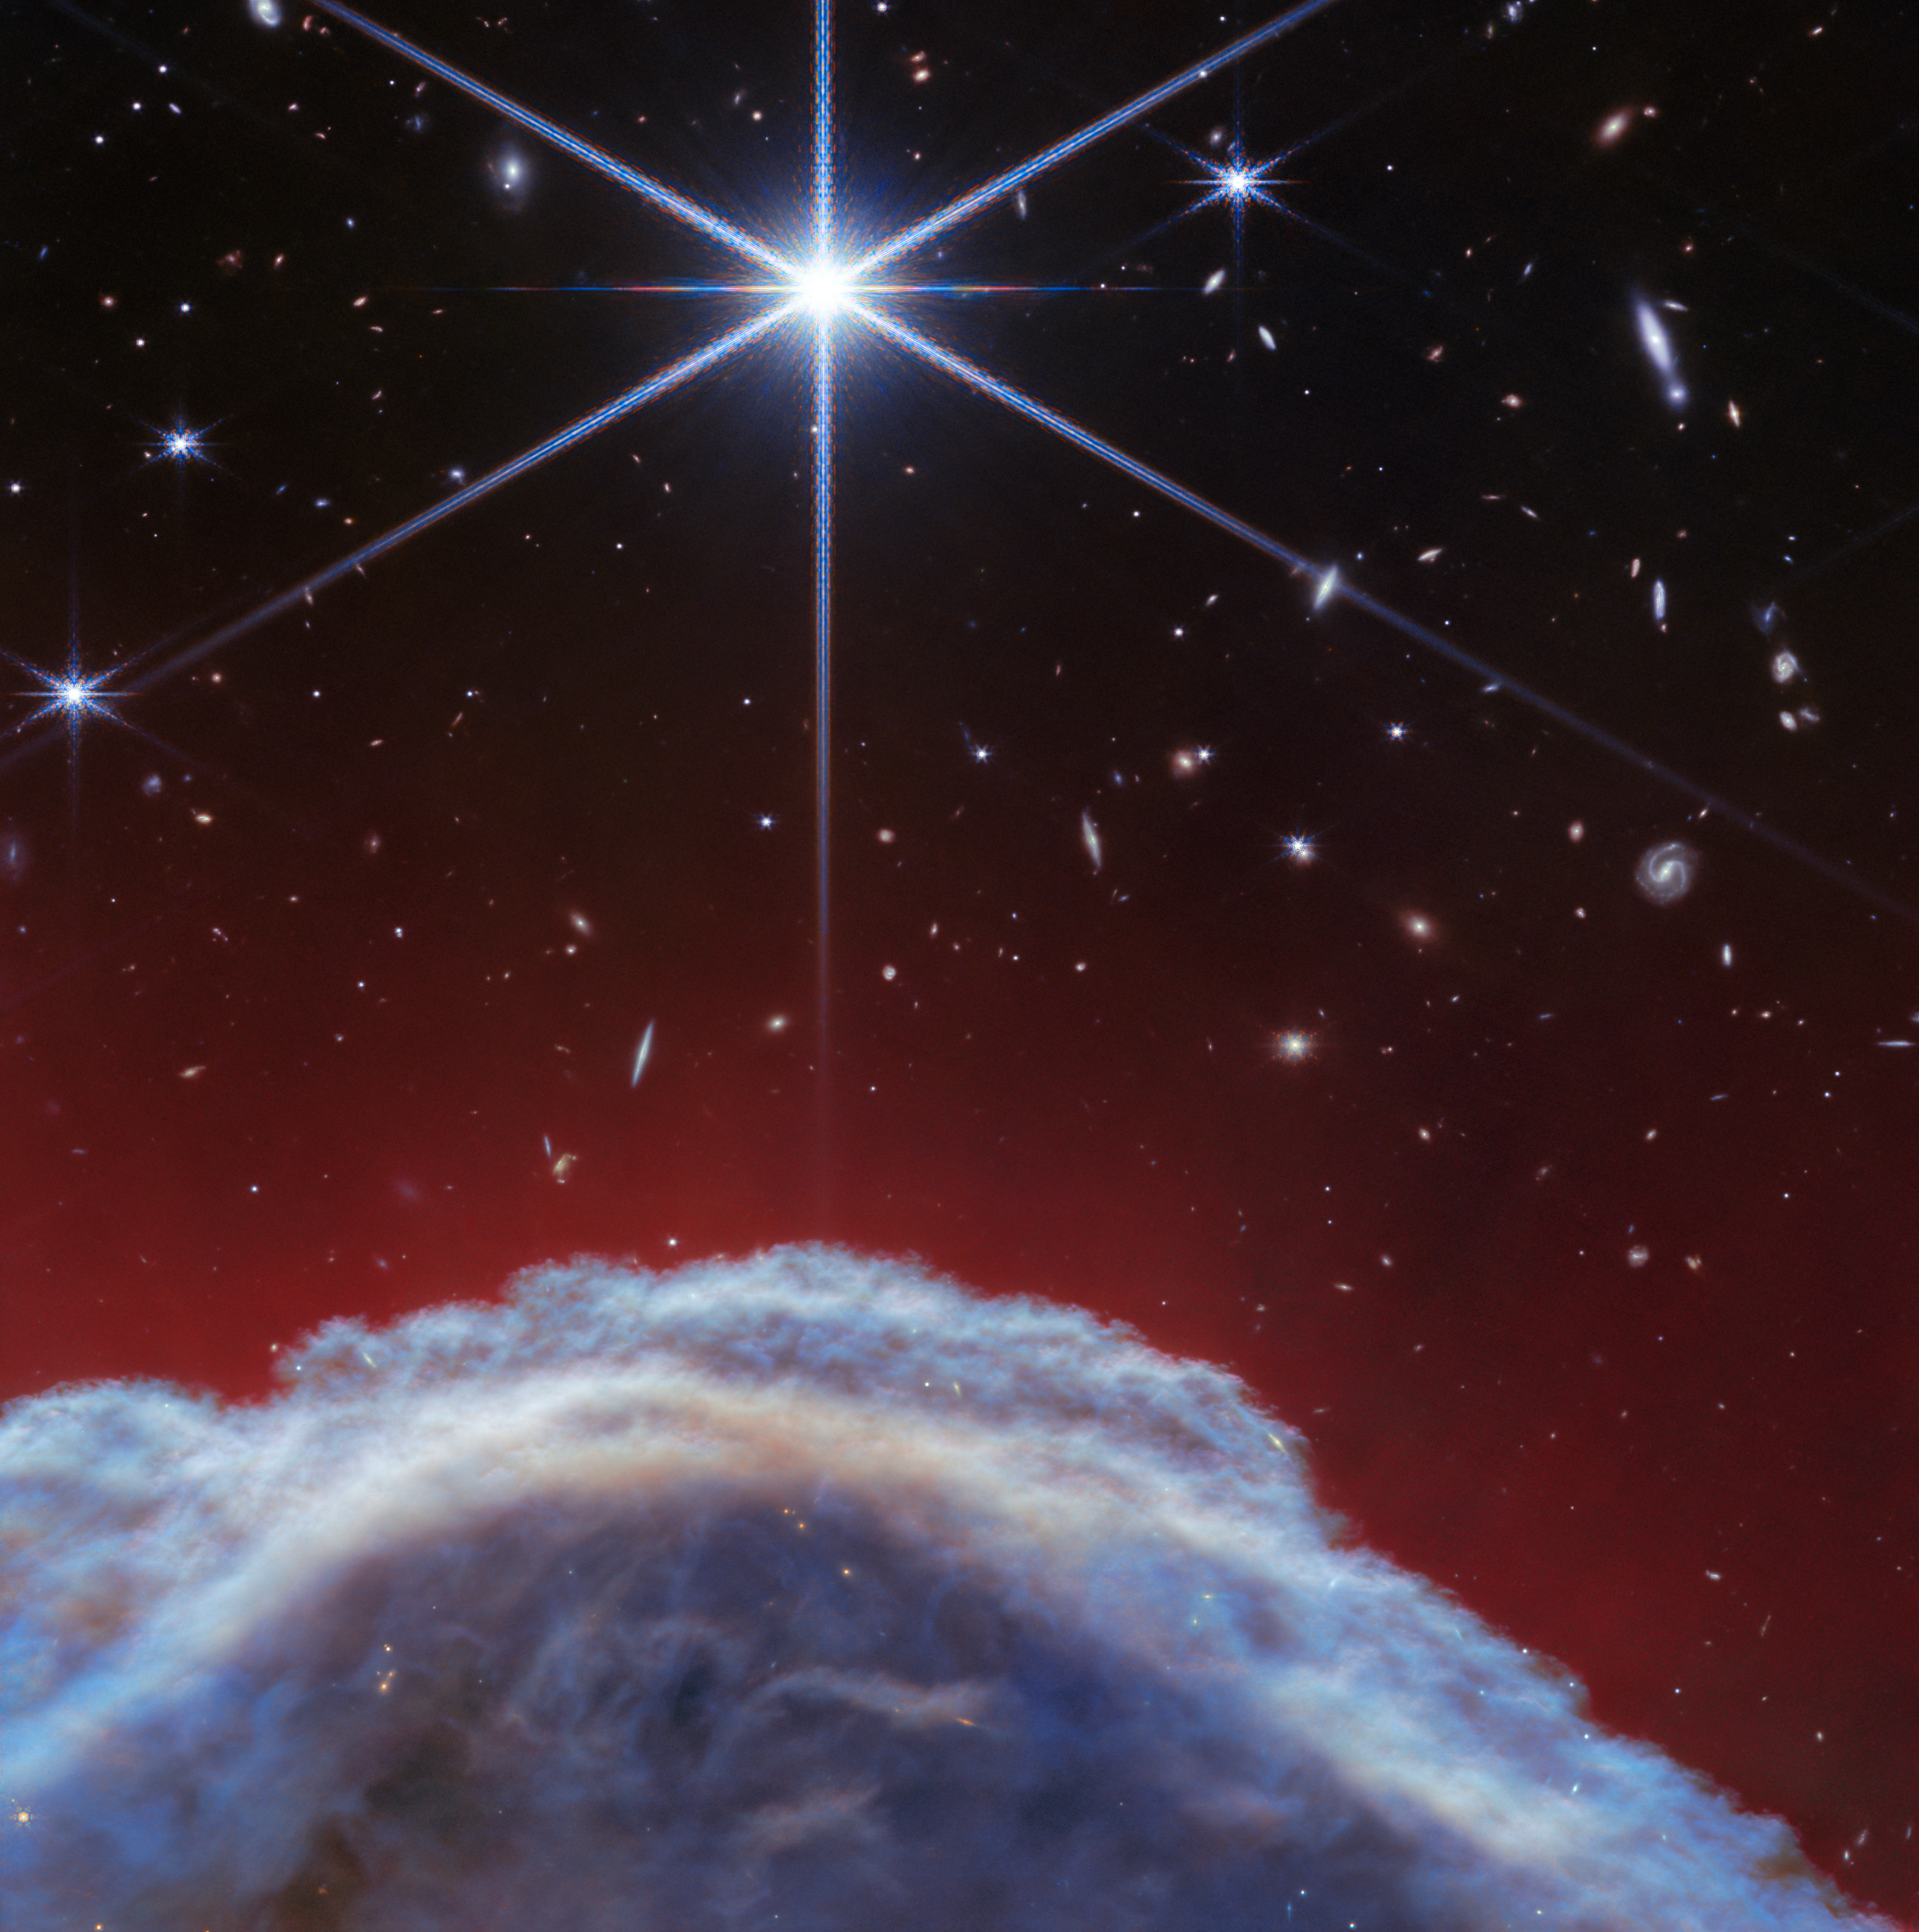

Horsehead Nebula (NIRCam image)

The NASA/ESA/CSA James Webb Space Telescope has captured the sharpest infrared images to date of one of the most distinctive objects in our skies, the Horsehead Nebula. These observations show a part of the iconic nebula in a whole new light, capturing its complexity with unprecedented spatial resolution.

Webb’s new images show part of the sky in the constellation Orion (The Hunter), in the western side of the Orion B molecular cloud. Rising from turbulent waves of dust and gas is the Horsehead Nebula, otherwise known as Barnard 33, which resides roughly 1300 light-years away.

The nebula formed from a collapsing interstellar cloud of material, and glows because it is illuminated by a nearby hot star. The gas clouds surrounding the Horsehead have already dissipated, but the jutting pillar is made of thick clumps of material that is harder to erode. Astronomers estimate that the Horsehead has about five million years left before it too disintegrates. Webb’s new view focuses on the illuminated edge of the top of the nebula’s distinctive dust and gas structure.

The Horsehead Nebula is a well-known photon-dominated region, or PDR. In such a region ultraviolet light from young, massive stars creates a mostly neutral, warm area of gas and dust between the fully ionised gas surrounding the massive stars and the clouds in which they are born. This ultraviolet radiation strongly influences the gas chemistry of these regions and acts as the most important source of heat.

These regions occur where interstellar gas is dense enough to remain neutral, but not dense enough to prevent the penetration of far-ultraviolet light from massive stars. The light emitted from such PDRs provides a unique tool to study the physical and chemical processes that drive the evolution of interstellar matter in our galaxy, and throughout the Universe from the early era of vigorous star formation to the present day.

Owing to its proximity and its nearly edge-on geometry, the Horsehead Nebula is an ideal target for astronomers to study the physical structures of PDRs and the evolution of the chemical characteristics of the gas and dust within their respective environments, and the transition regions between them. It is considered one of the best objects in the sky to study how radiation interacts with interstellar matter.

This image was captured with Webb’s NIRCam (Near-InfraRed Camera) instrument.

Credit: ESA/Webb, NASA, CSA, K. Misselt (University of Arizona) and A. Abergel (IAS/University Paris-Saclay, CNRS)